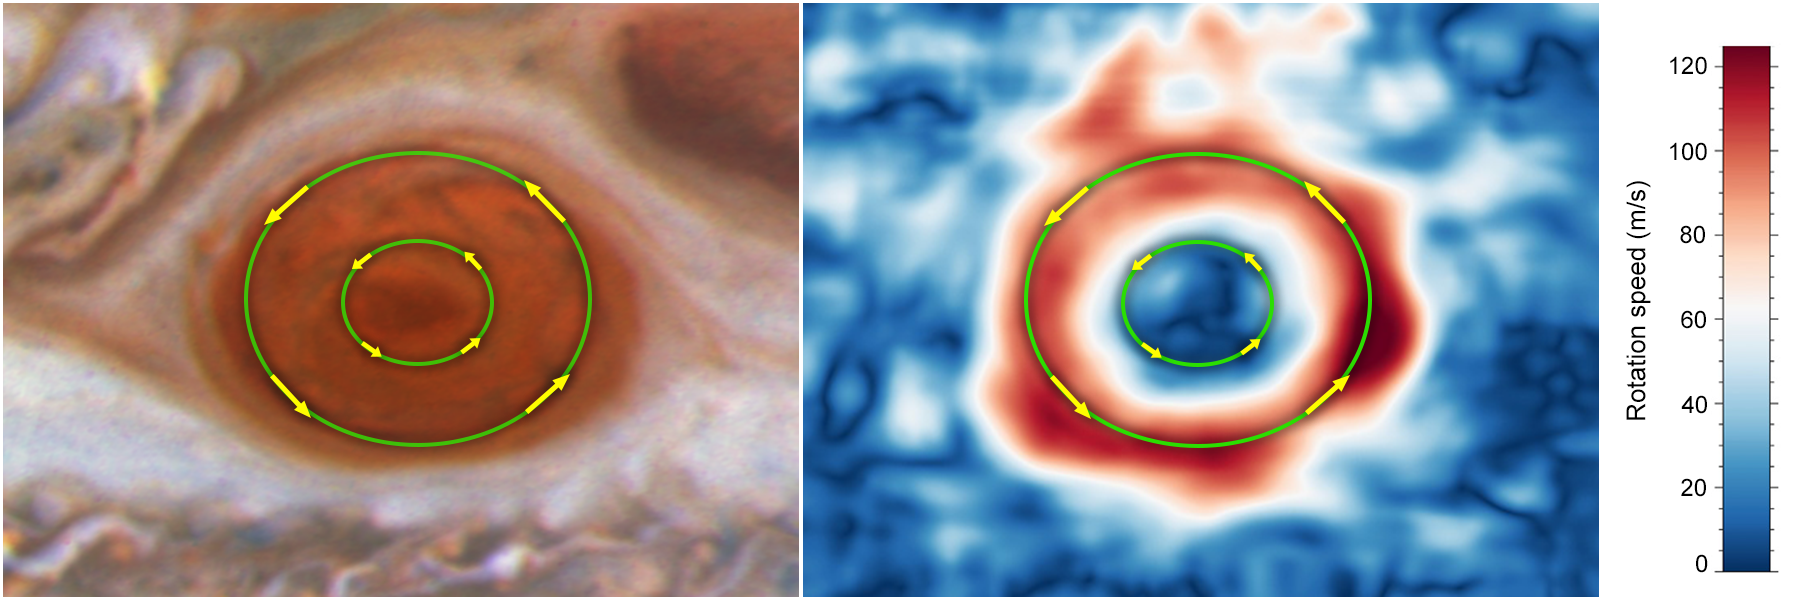

Winds in Jupiter’s Great Red Spot

c. In contrast, the winds near the storm's innermost region, set off by a smaller green ring, are moving significantly more slowly. Both move counterclockwise.

Credit: NASA, ESA, Michael H. Wong (UC Berkeley)